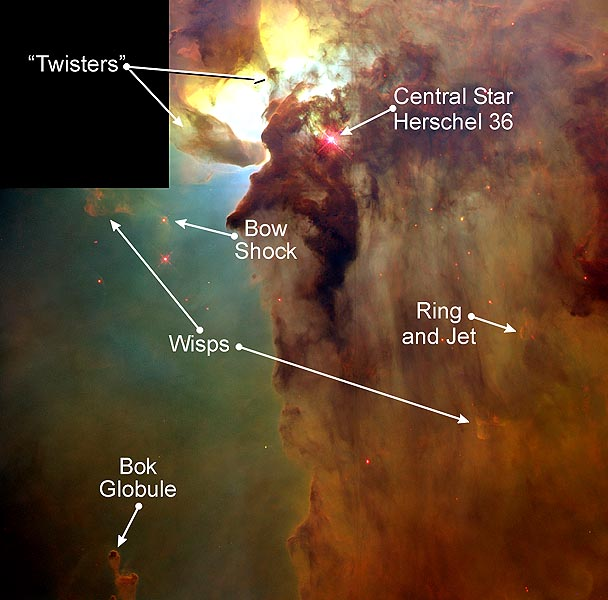

Giant 'Twisters' in the Lagoon Nebula

This Hubble Space Telescope (HST) image reveals a pair of one-half light-year long interstellar 'twisters' -- eerie funnels and twisted-rope structures (upper left) -- in the heart of the Lagoon Nebula (Messier 8) which lies 5, 000 light-years away in the direction of the constellation Sagittarius.

Credit: A. Caulet (ST-ECF, ESA) and NASA